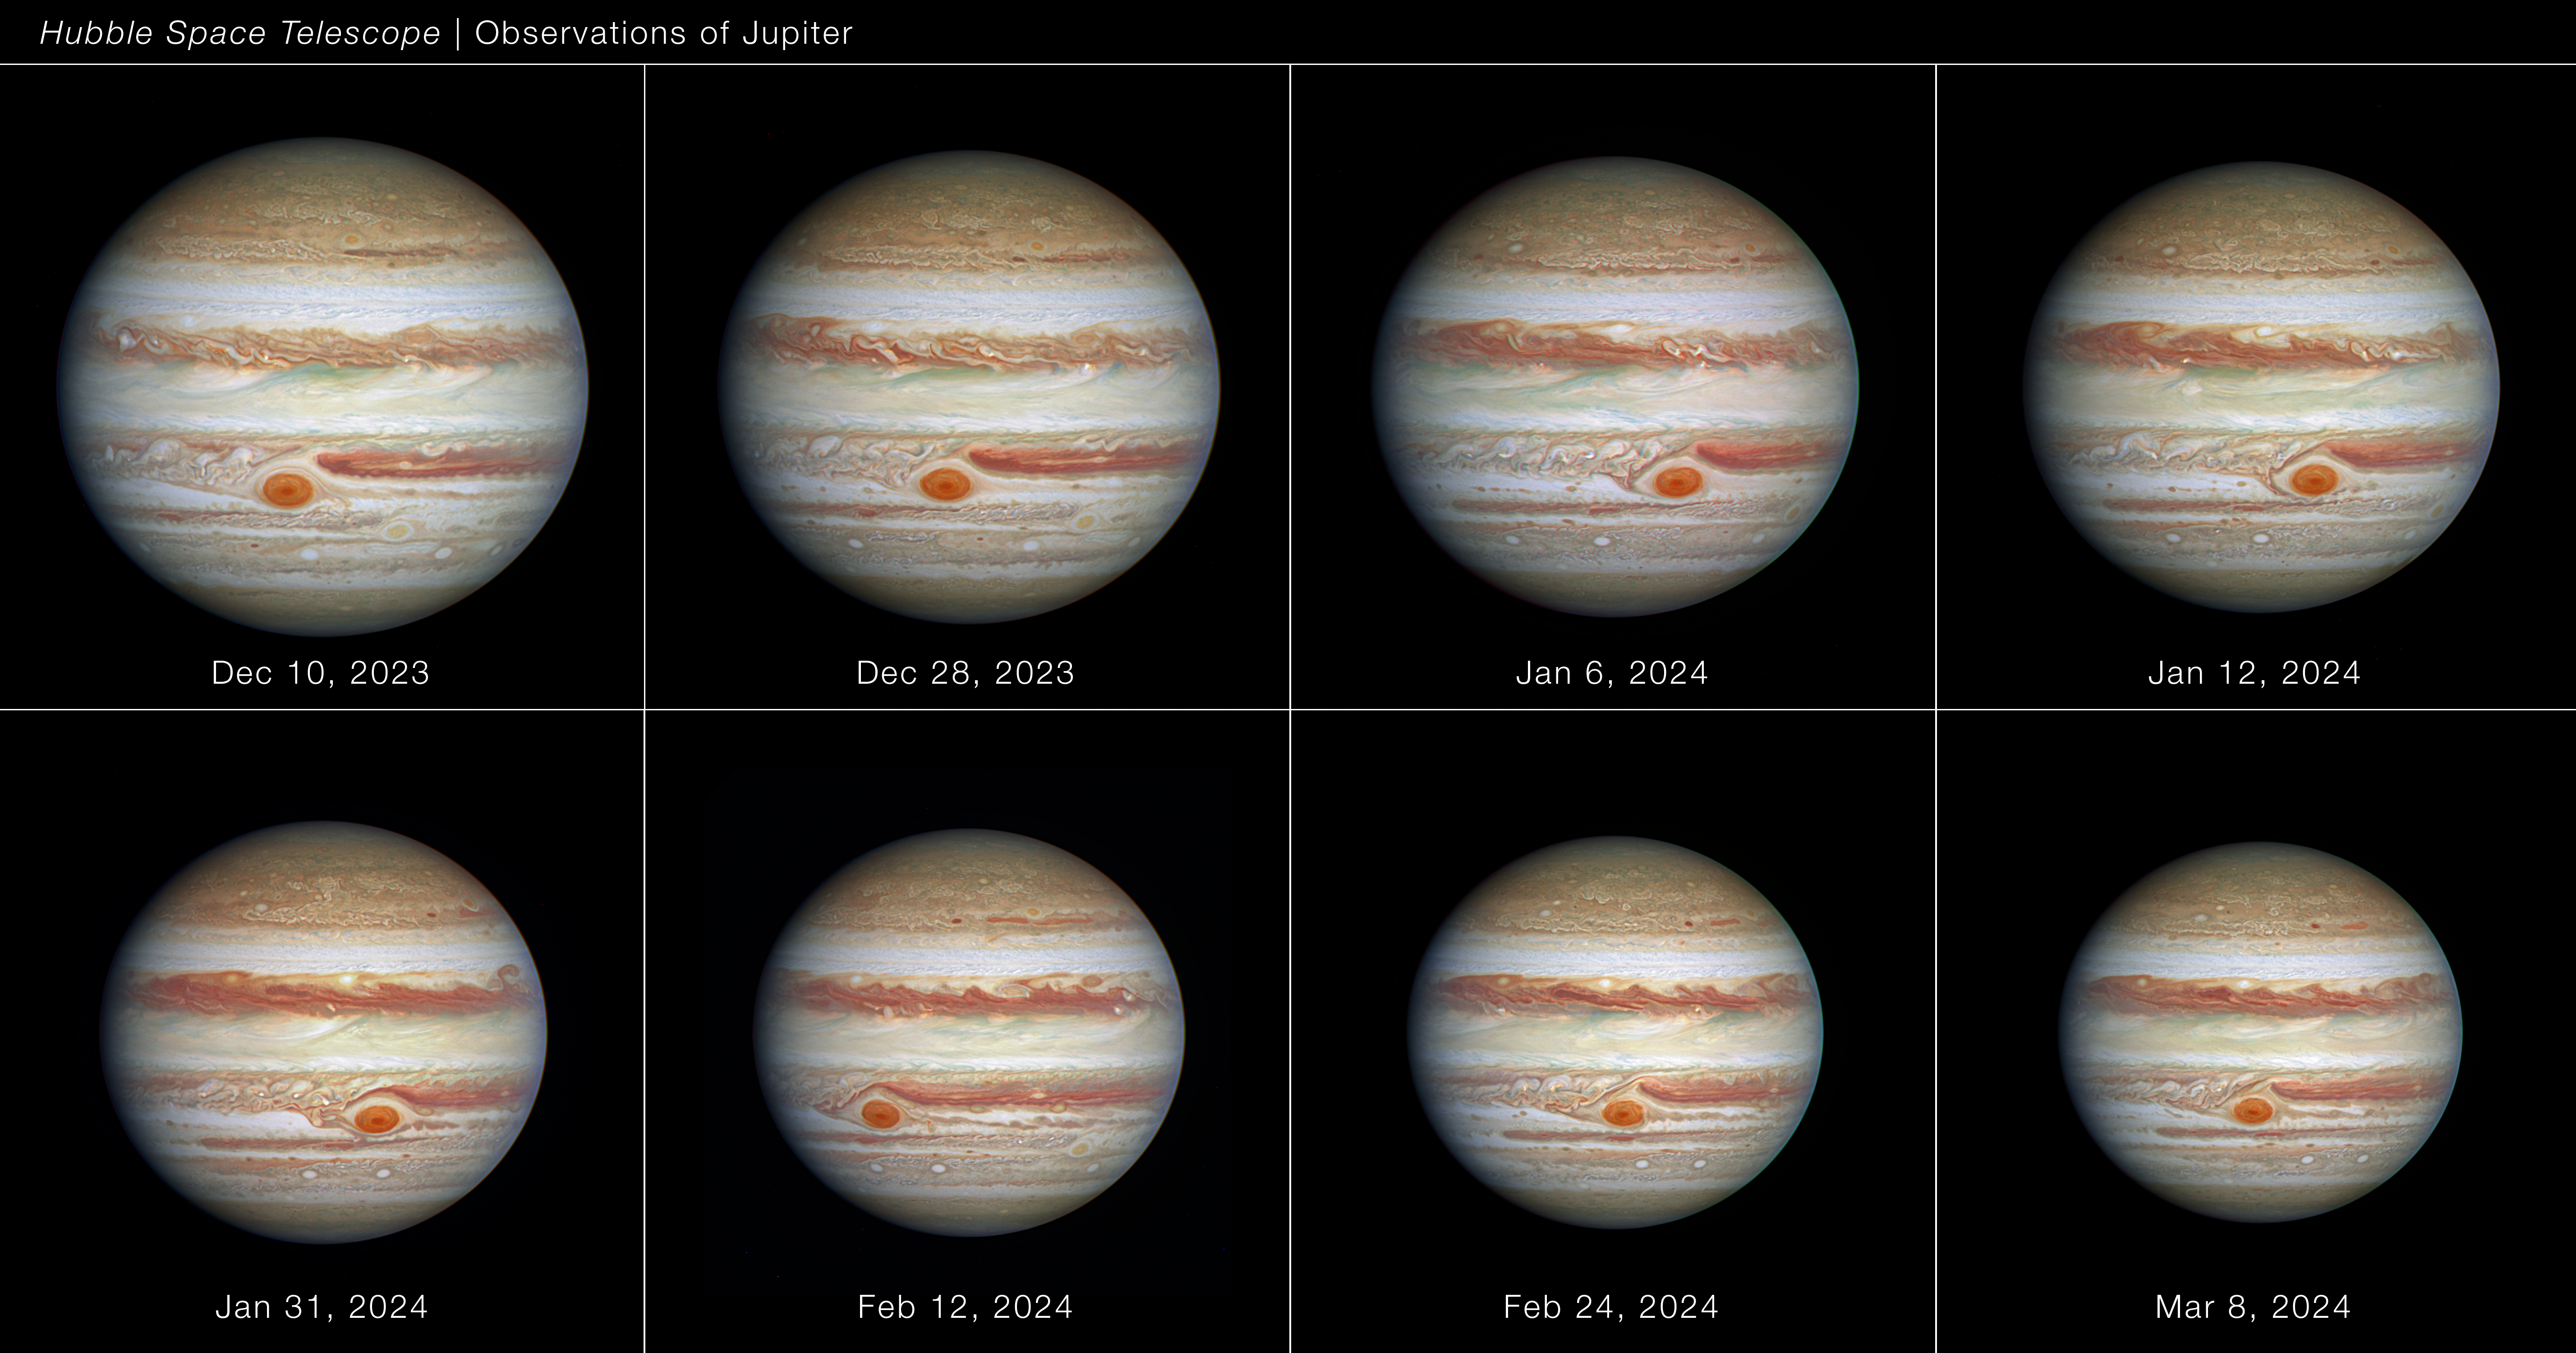

Full disc of Jupiter (December 2023 to March 2024)

Using Hubble Space Telescope data spanning approximately 90 days (between December 2023 and March 2024) when the giant planet Jupiter was approximately 630 million to 820 million from the Sun, astronomers measured the Great Red Spot’s size, shape, brightness, colour, and vorticity over a full oscillation cycle. The data reveal that the Great Red Spot is not as stable as it might look. It was observed going through an oscillation in its elliptical shape, jiggling like a bowl of gelatin. The cause of the 90-day oscillation is unknown. The observation is part of the Outer Planet Atmospheres Legacy program (OPAL).

Credit: NASA, ESA, A. Simon (GSFC)